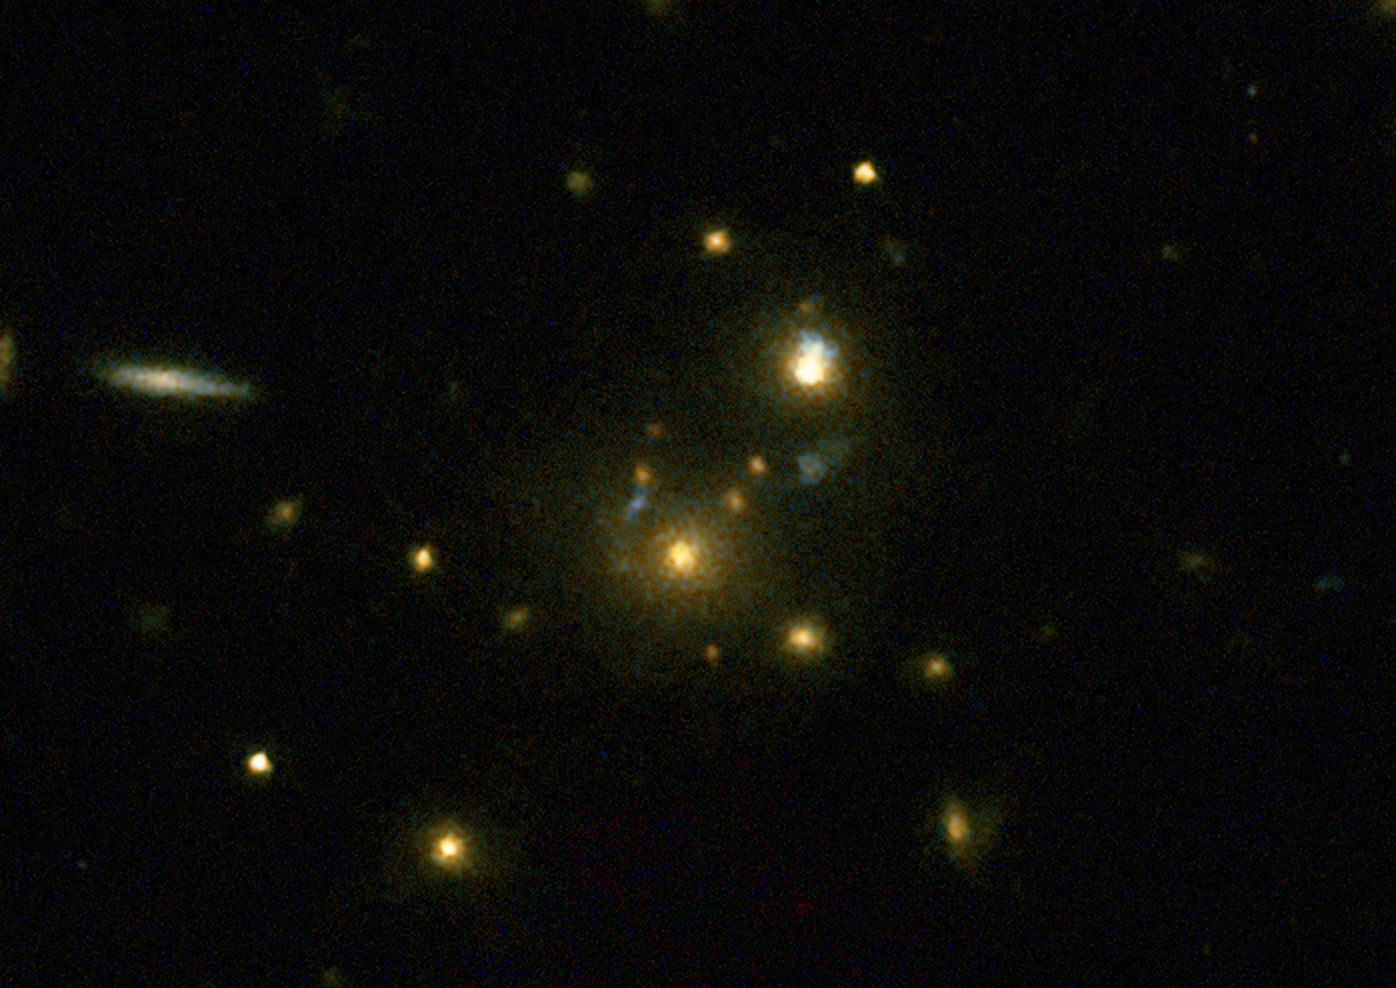

Radio galaxy 3C 356

This image taken with the NASA/ESA Hubble Space Telescope shows the galaxy 3C 356 which was part of a large survey of galaxies.

The survey confirmed the link between mergers and galaxies hosting relativistic jets from supermassive black holes. These galaxies have very strong emissions at radio wavelengths implying that the supermassive black holes they host are feeding huge outflows of plasma.

Credit: NASA, ESA, M. Chiaberge (STScI)